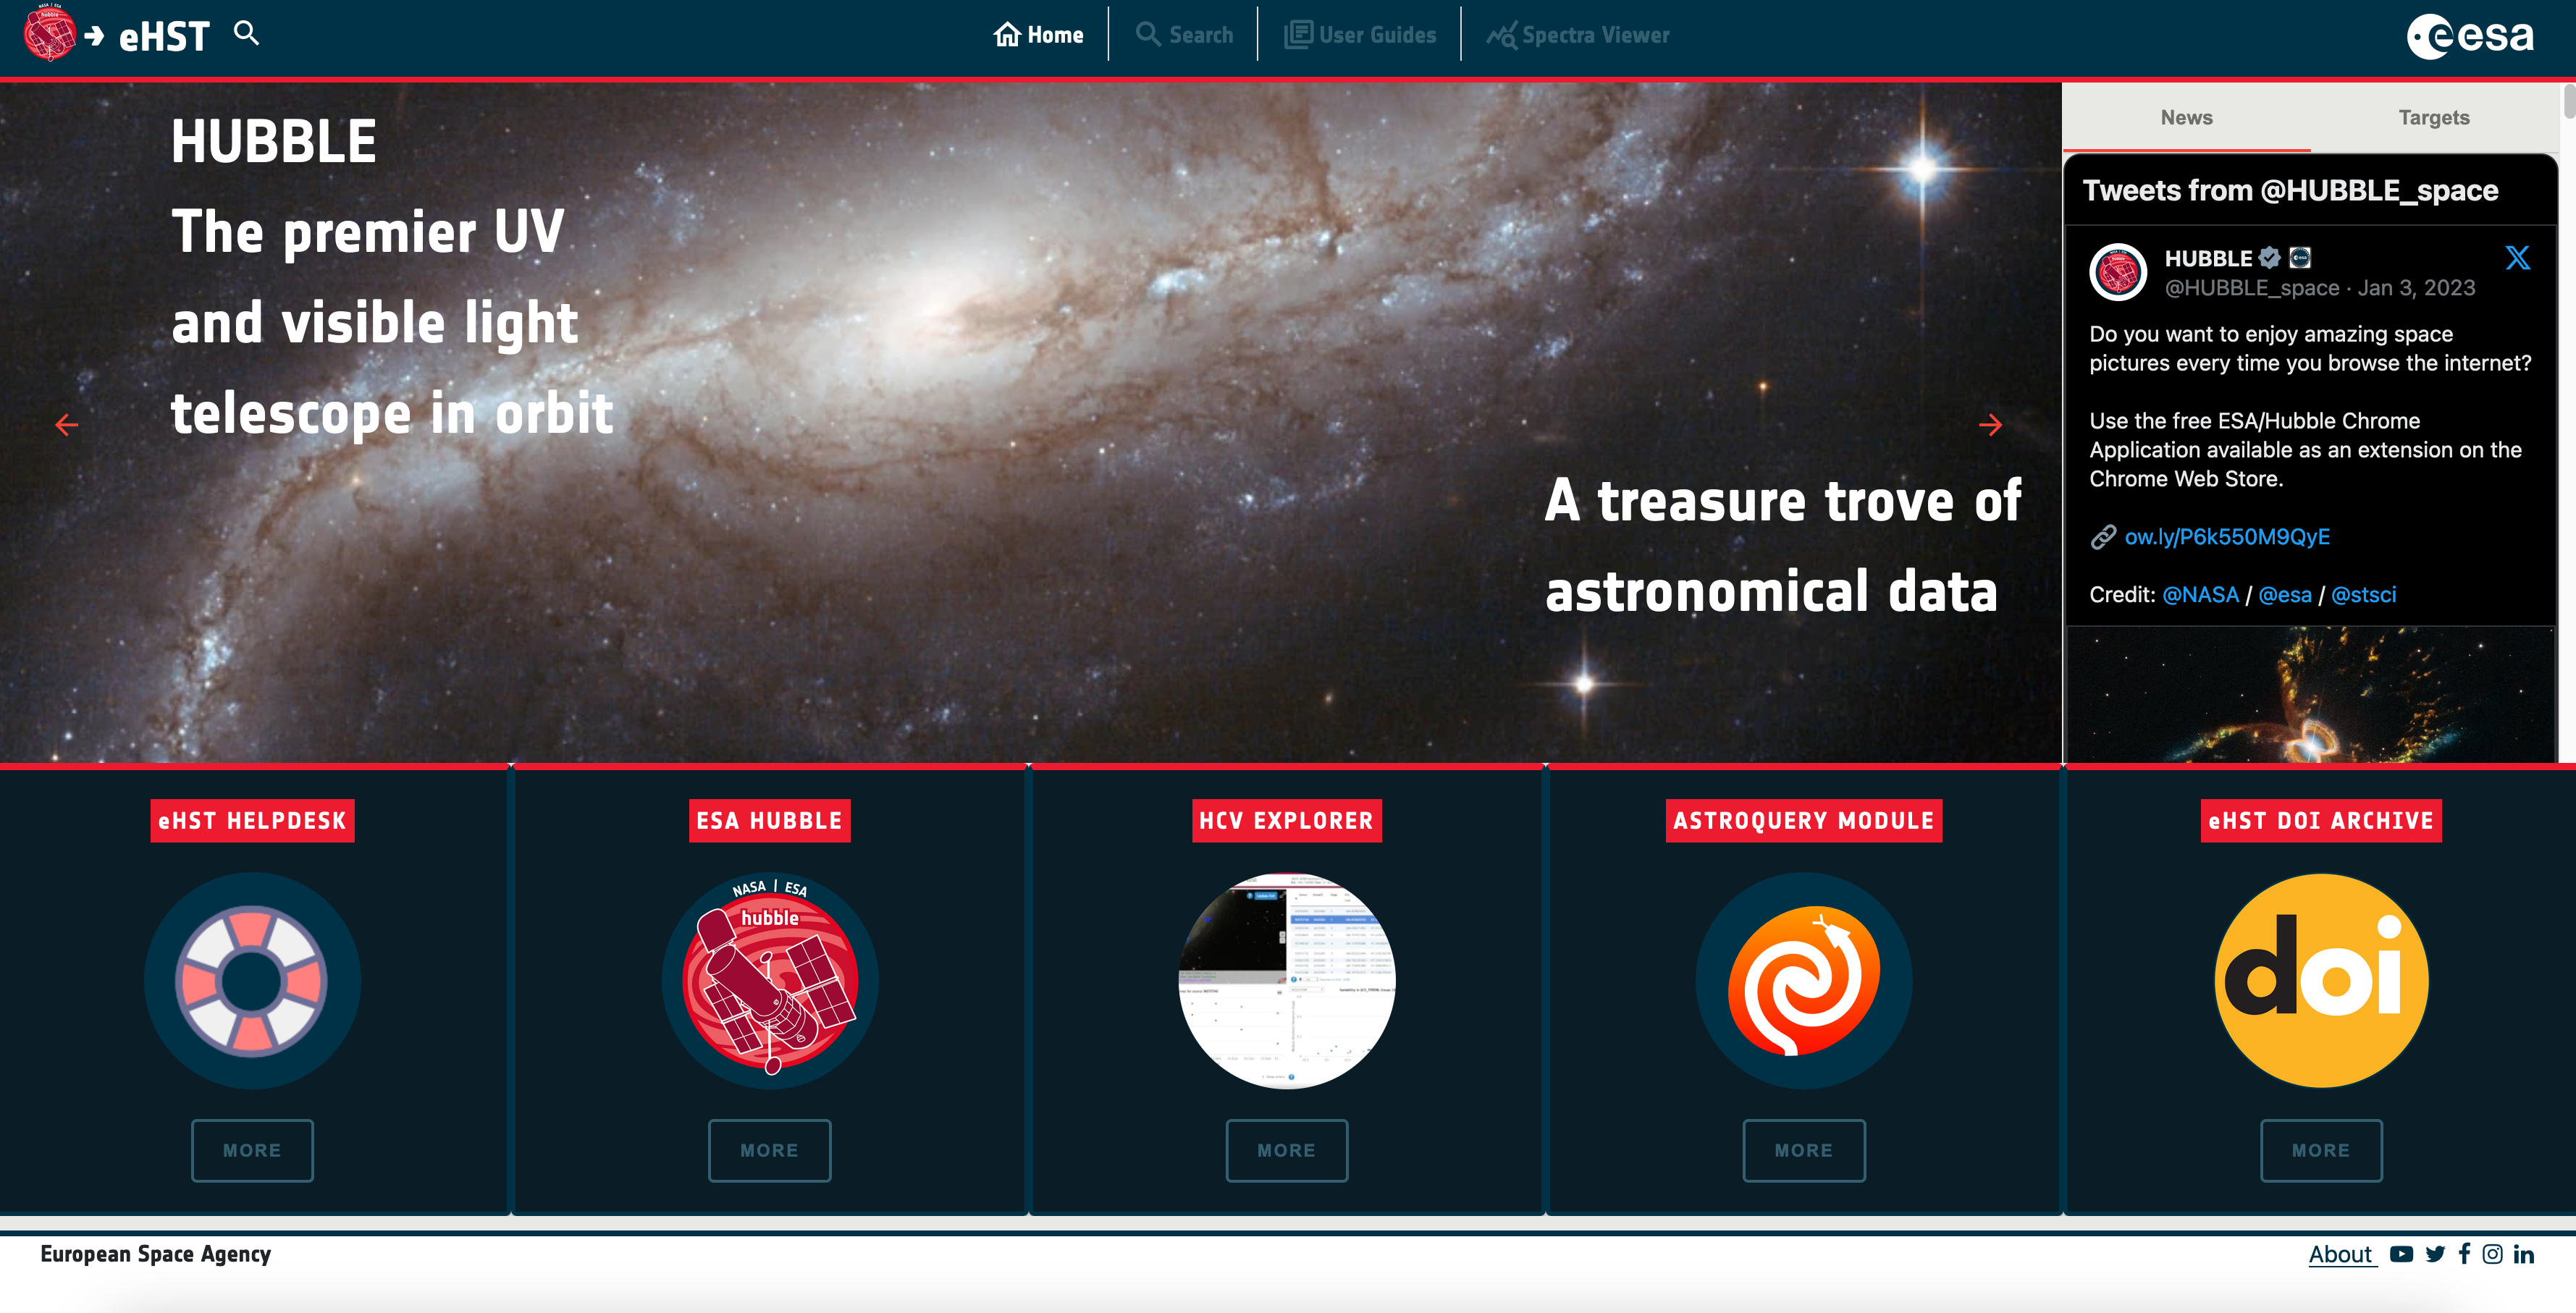

eHST user interface

This image shows the eHST user interface.

Credit: eHST